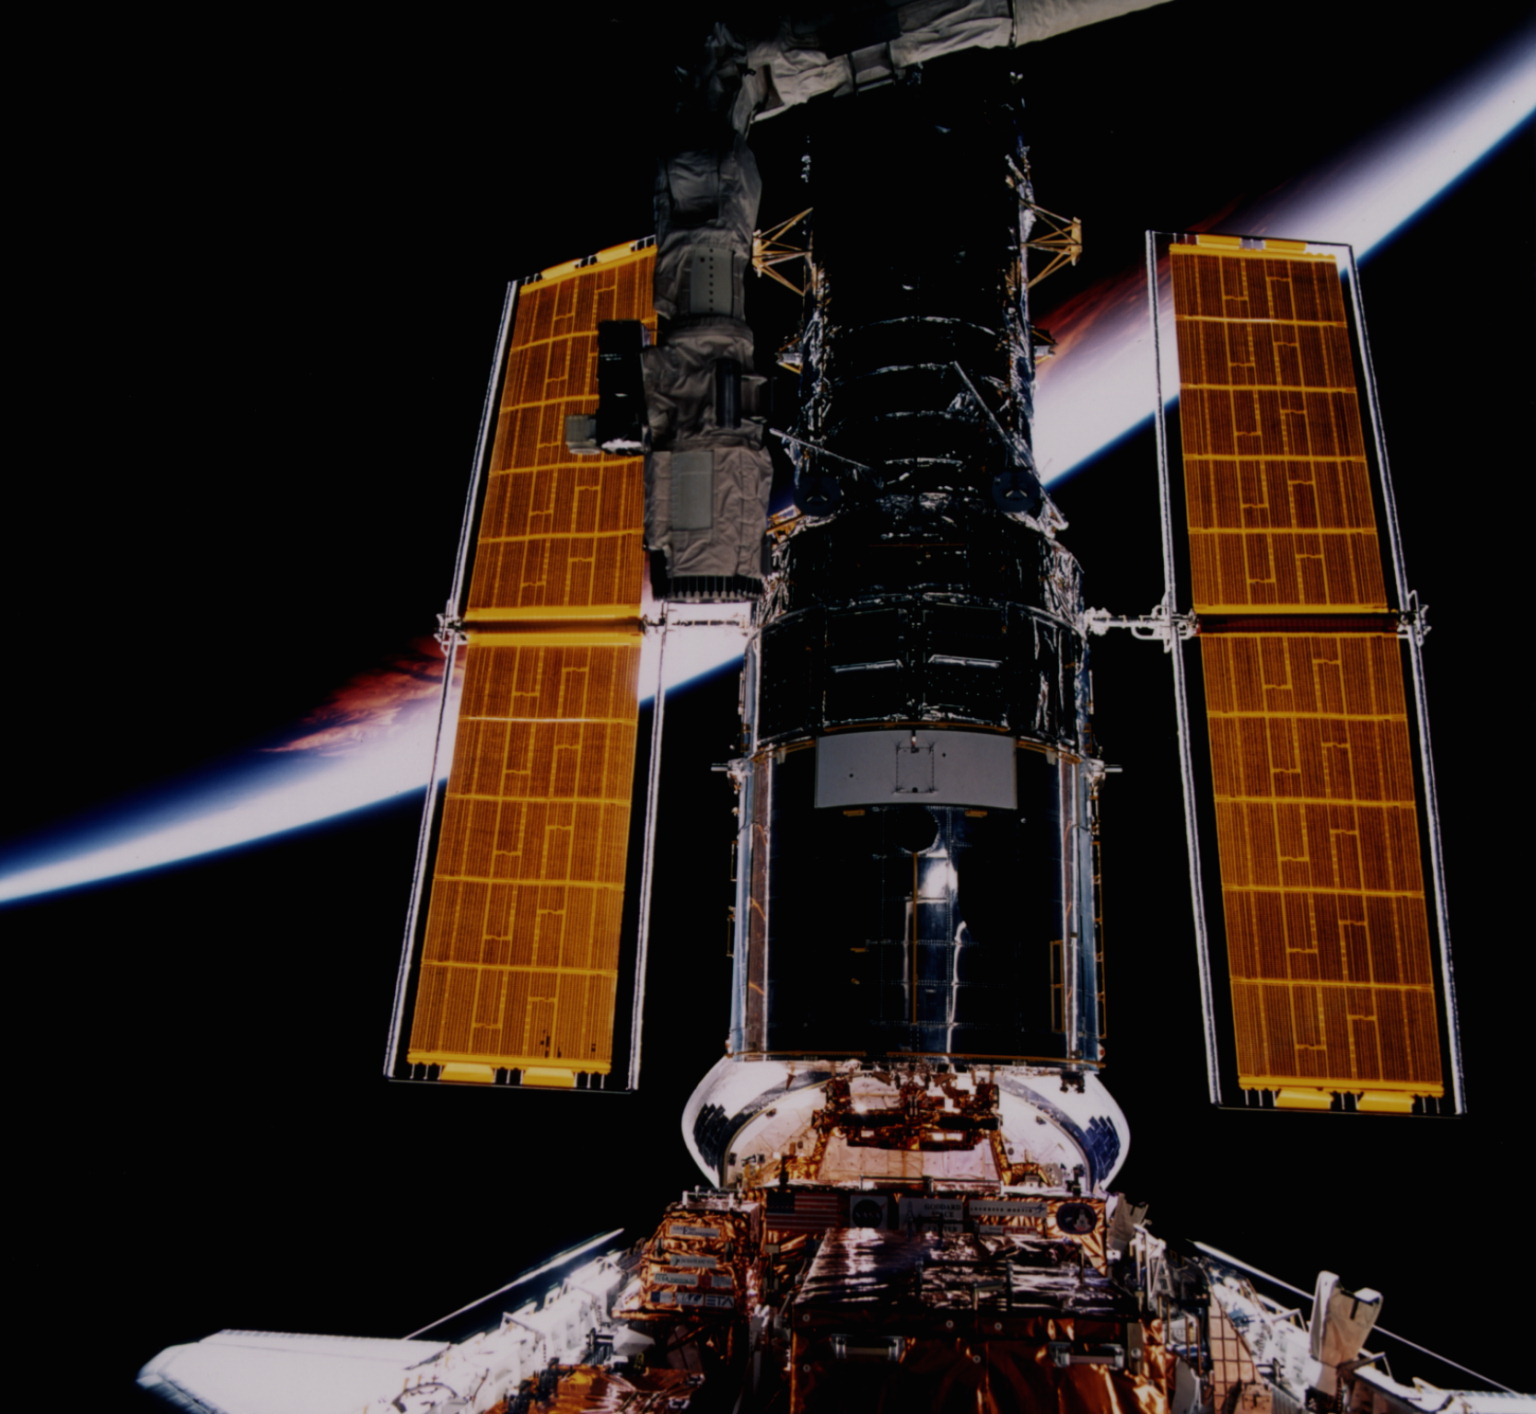

Hubble Space Telescope

This is a close-up view of the Hubble Space Telescope (HST).

Credit: NASA/ESA